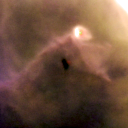

203-506

One of 42 new proplyds discovered in the Orion Nebula, 203-506 is one of the dark proplyds that lies relatively far from the nebula’s brightest star, Theta 1 Orionis C.

Credit: NASA/ESA and L. Ricci (ESO)